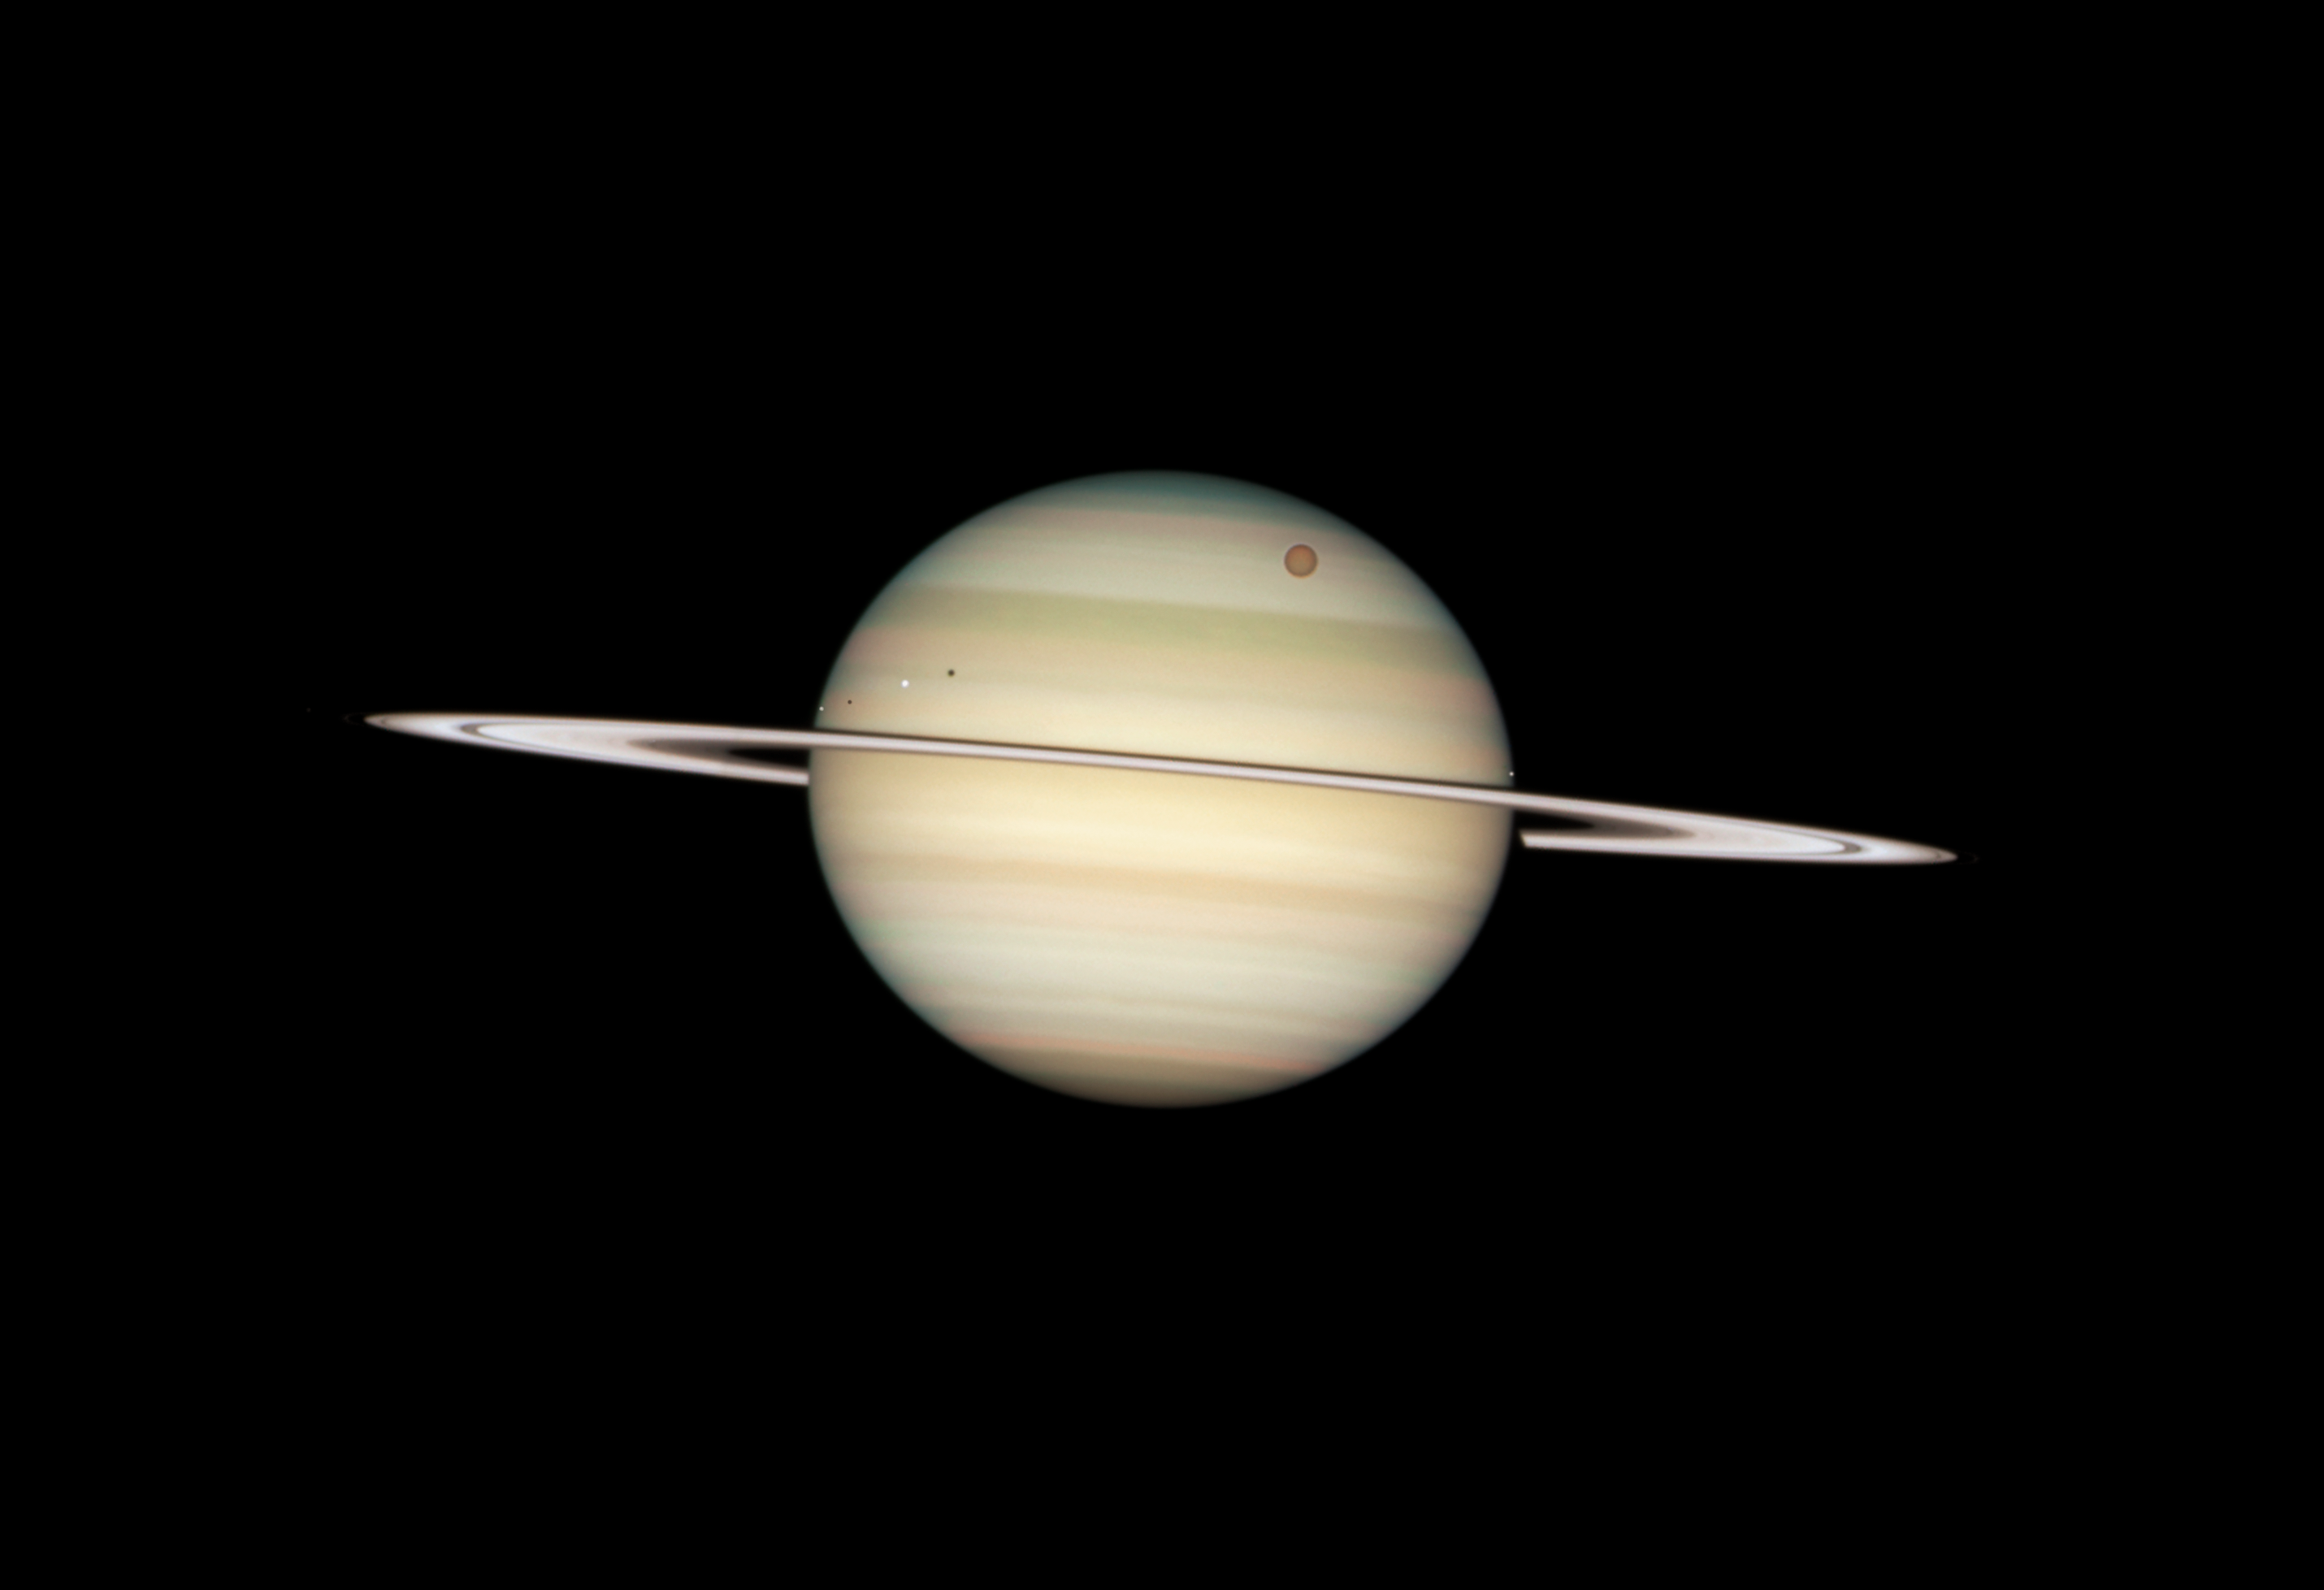

Quadruple Saturn moon transit snapped by Hubble

On 24 February 2009, the NASA/ESA Hubble Space Telescope captured a photo sequence of four moons of Saturn passing in front of their parent planet. The moons, from far left to right, are the white icy moons Enceladus and Dione, the large orange moon Titan, and icy Mimas. Due to the angle of the Sun, they are each preceded by their own shadow.

Credit: NASA, ESA and the Hubble Heritage Team (STScI/AURA)